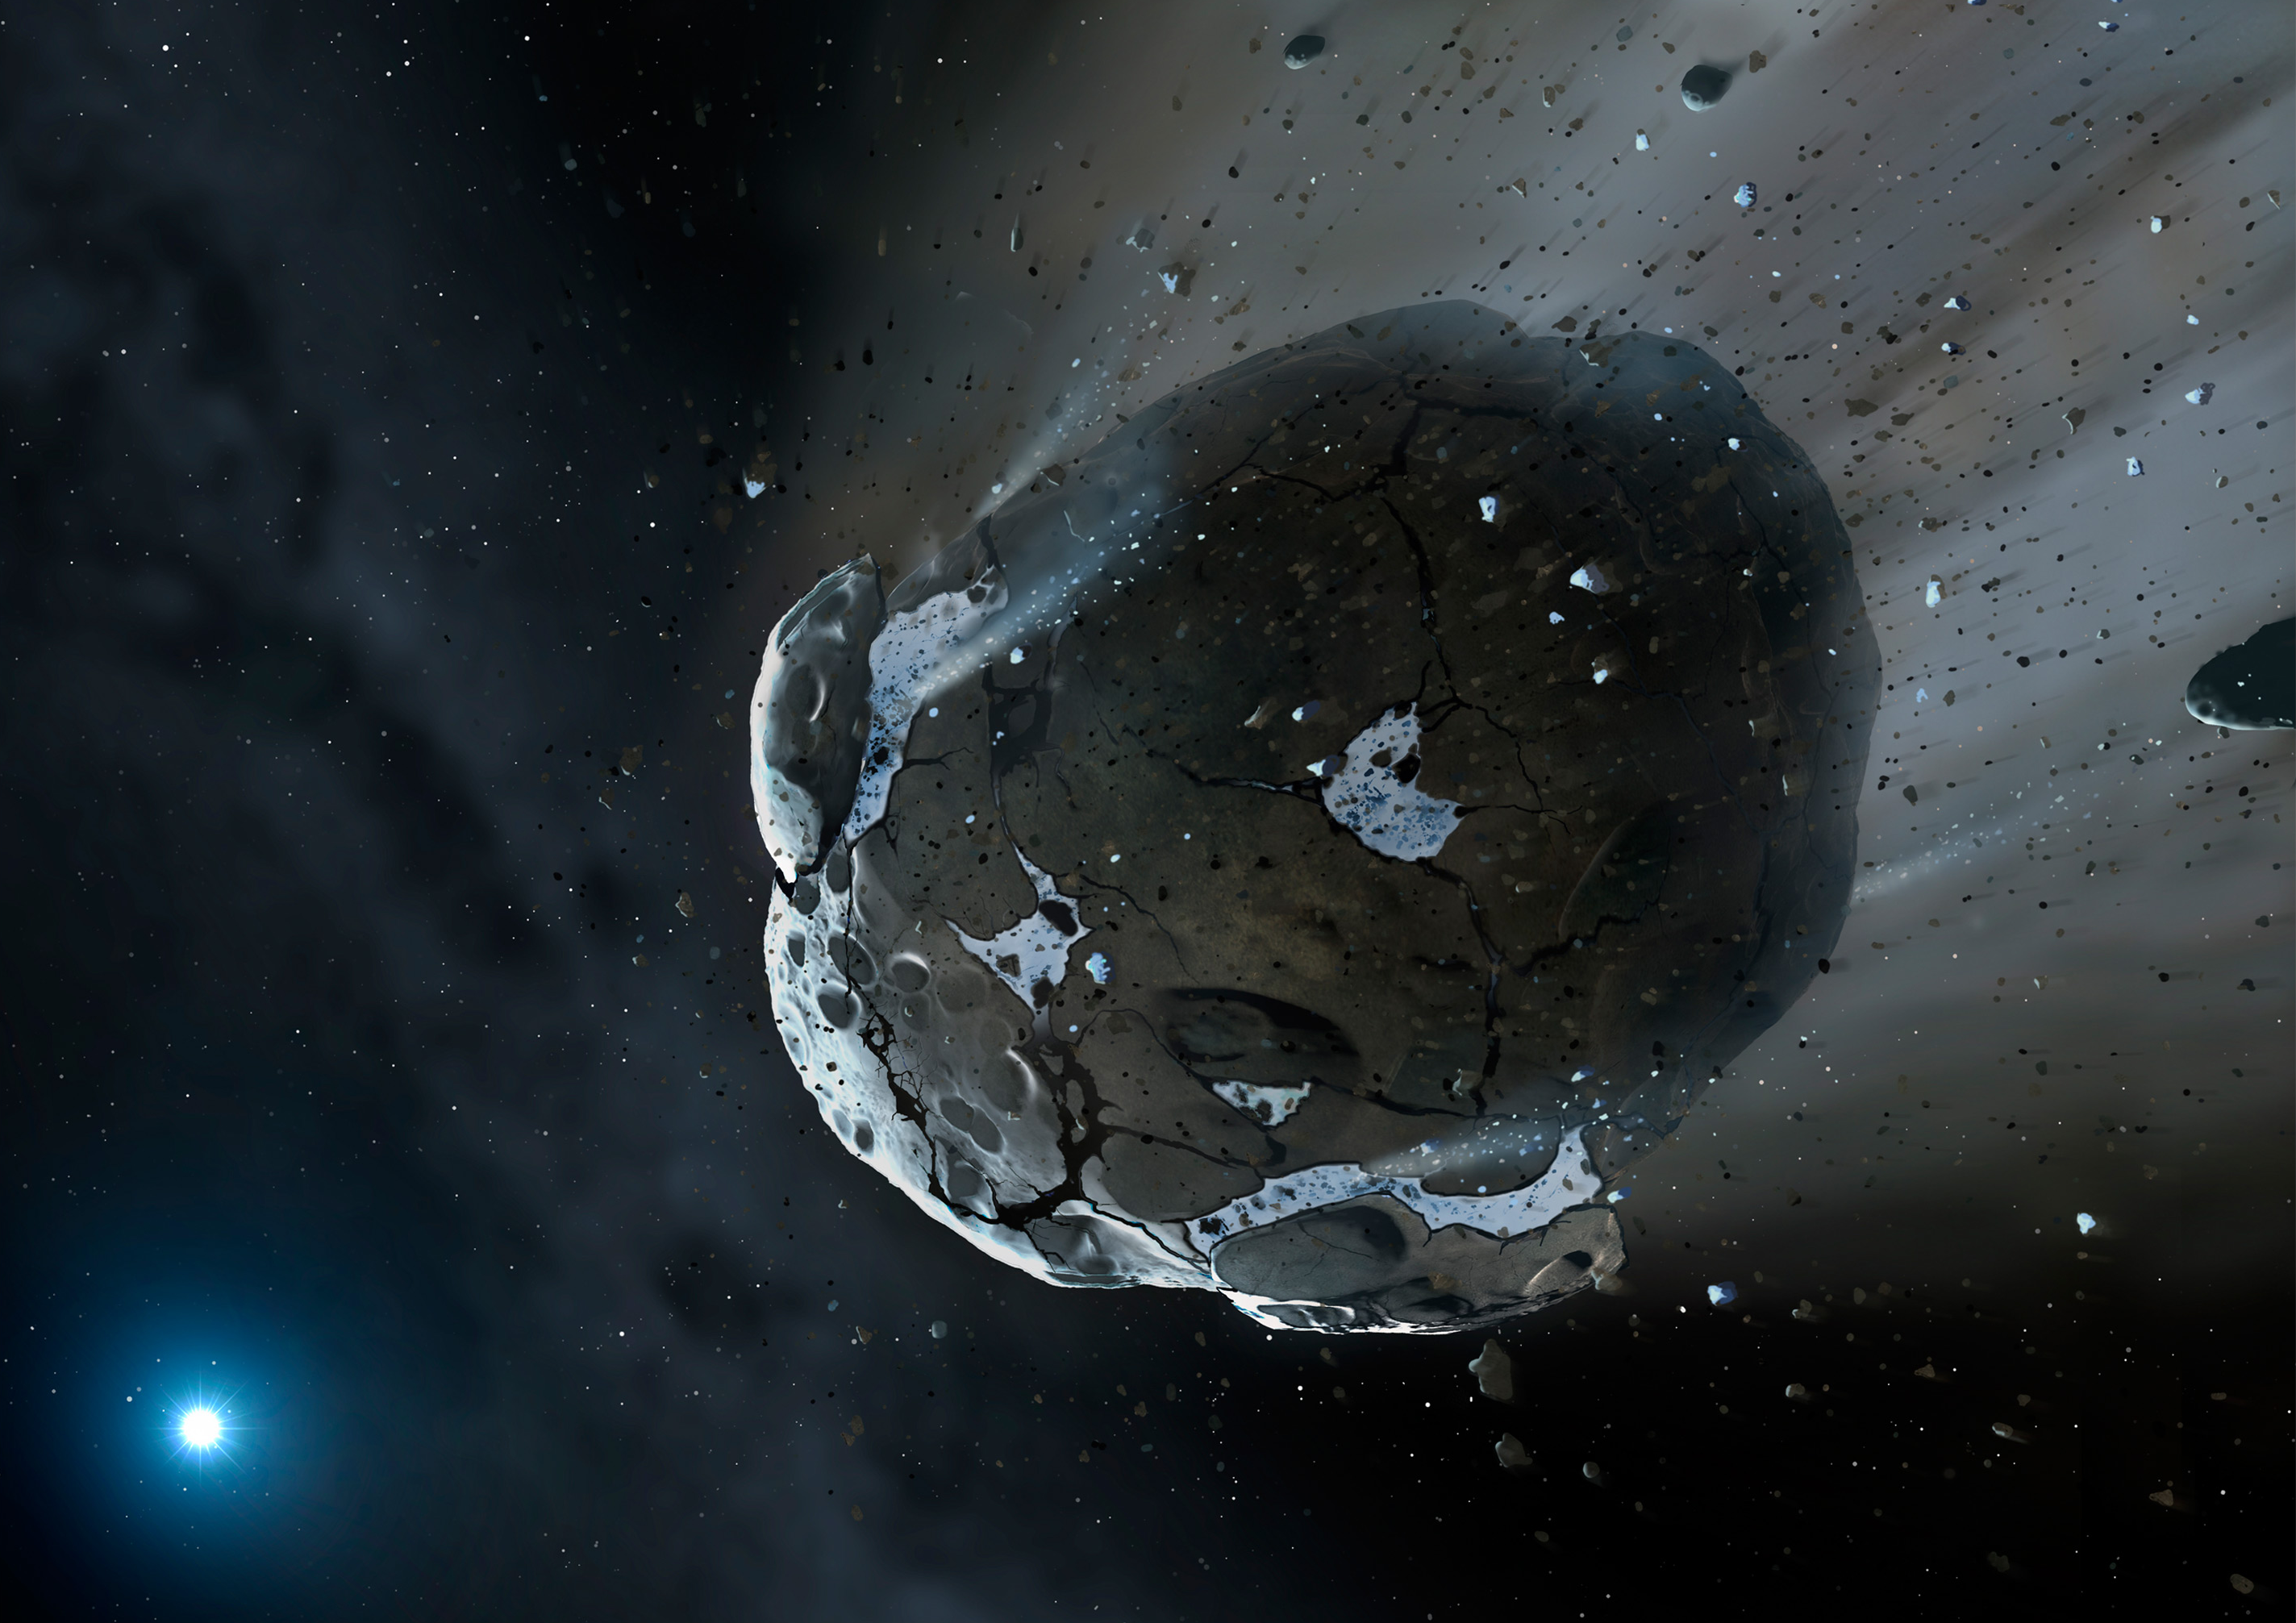

Artist's view of watery asteroid in white dwarf star system GD 61

This is an artist's impression of a rocky and water-rich asteroid being torn apart by the strong gravity of the white dwarf star GD 61. Similar objects in our solar system likely delivered the bulk of water on Earth and represent the building blocks of the terrestrial planets.

Credit: NASA, ESA, M.A. Garlick (space-art.co.uk), University of Warwick, and University of Cambridge.